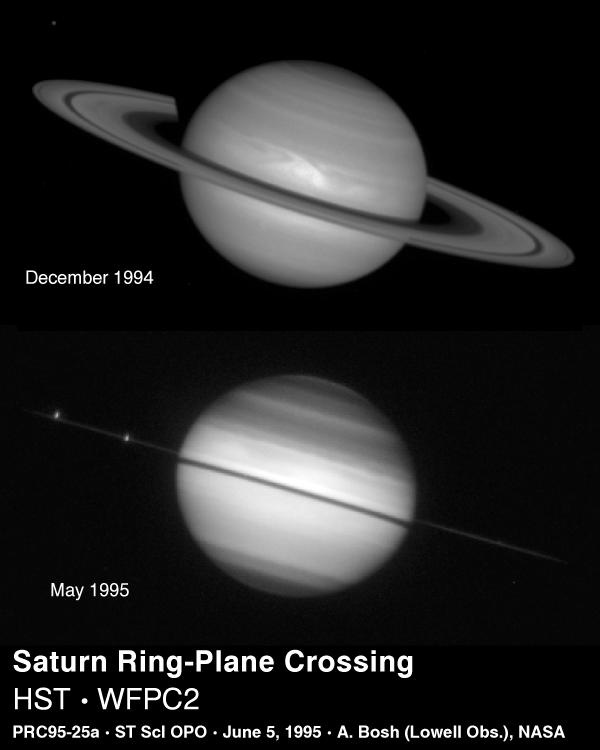

Saturn ring-plane crossing

In one of nature's most dramatic examples of 'now-you see-them, now-you-don't', the Hubble Space Telescope captured Saturn on May 22, 1995 as the planet's magnificent ring system turned edge-on. This ring-plane crossing occurs approximately every 15 years when the Earth passes through Saturn's ring plane.

Credit: Reta Beebe (New Mexico State University), D. Gilmore, L. Bergeron (STScI), NASA/ESA, Amanda S. Bosh (Lowell Observatory), Andrew S. Rivkin (Univ. of Arizona/LPL), the HST High Speed Photometer Instrument Team (R.C. Bless, PI), and NASA/ESA